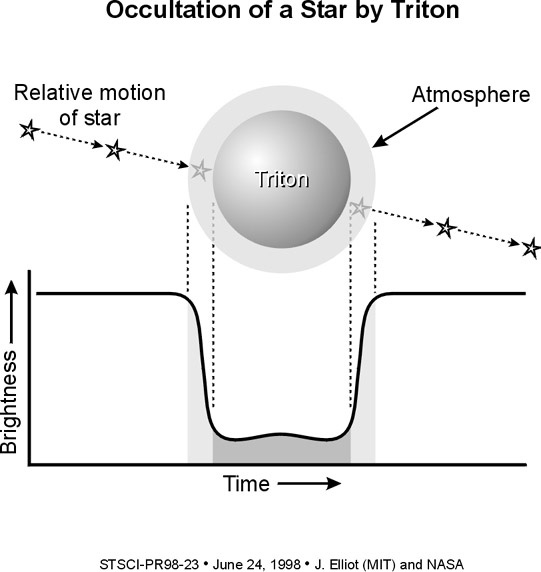

Hubble Space Telescope helps find evidence that Neptune's largest moon is warming up

Observations obtained by the NASA/ESA Hubble Space Telescope and ground-based instruments reveal that Neptune's largest moon, Triton, seems to have heated up significantly since the Voyager spacecraft visited it in 1989.

'Since 1989, at least, Triton has been undergoing a period of global warming – percentage-wise, it’s a very large increase, ' said James L. Elliot, an astronomer at the Massachusetts Institute of Technology (MIT), Cambridge, MA. The warming trend is causing part of Triton’s frozen nitrogen surface to turn into gas, thus making its thin atmosphere denser. Dr. Elliot and his colleagues from MIT, Lowell Observatory, and Williams College published their findings in the June 25 issue of the journal Nature.

Credit: J. Elliot (MIT), and NASA/ESA